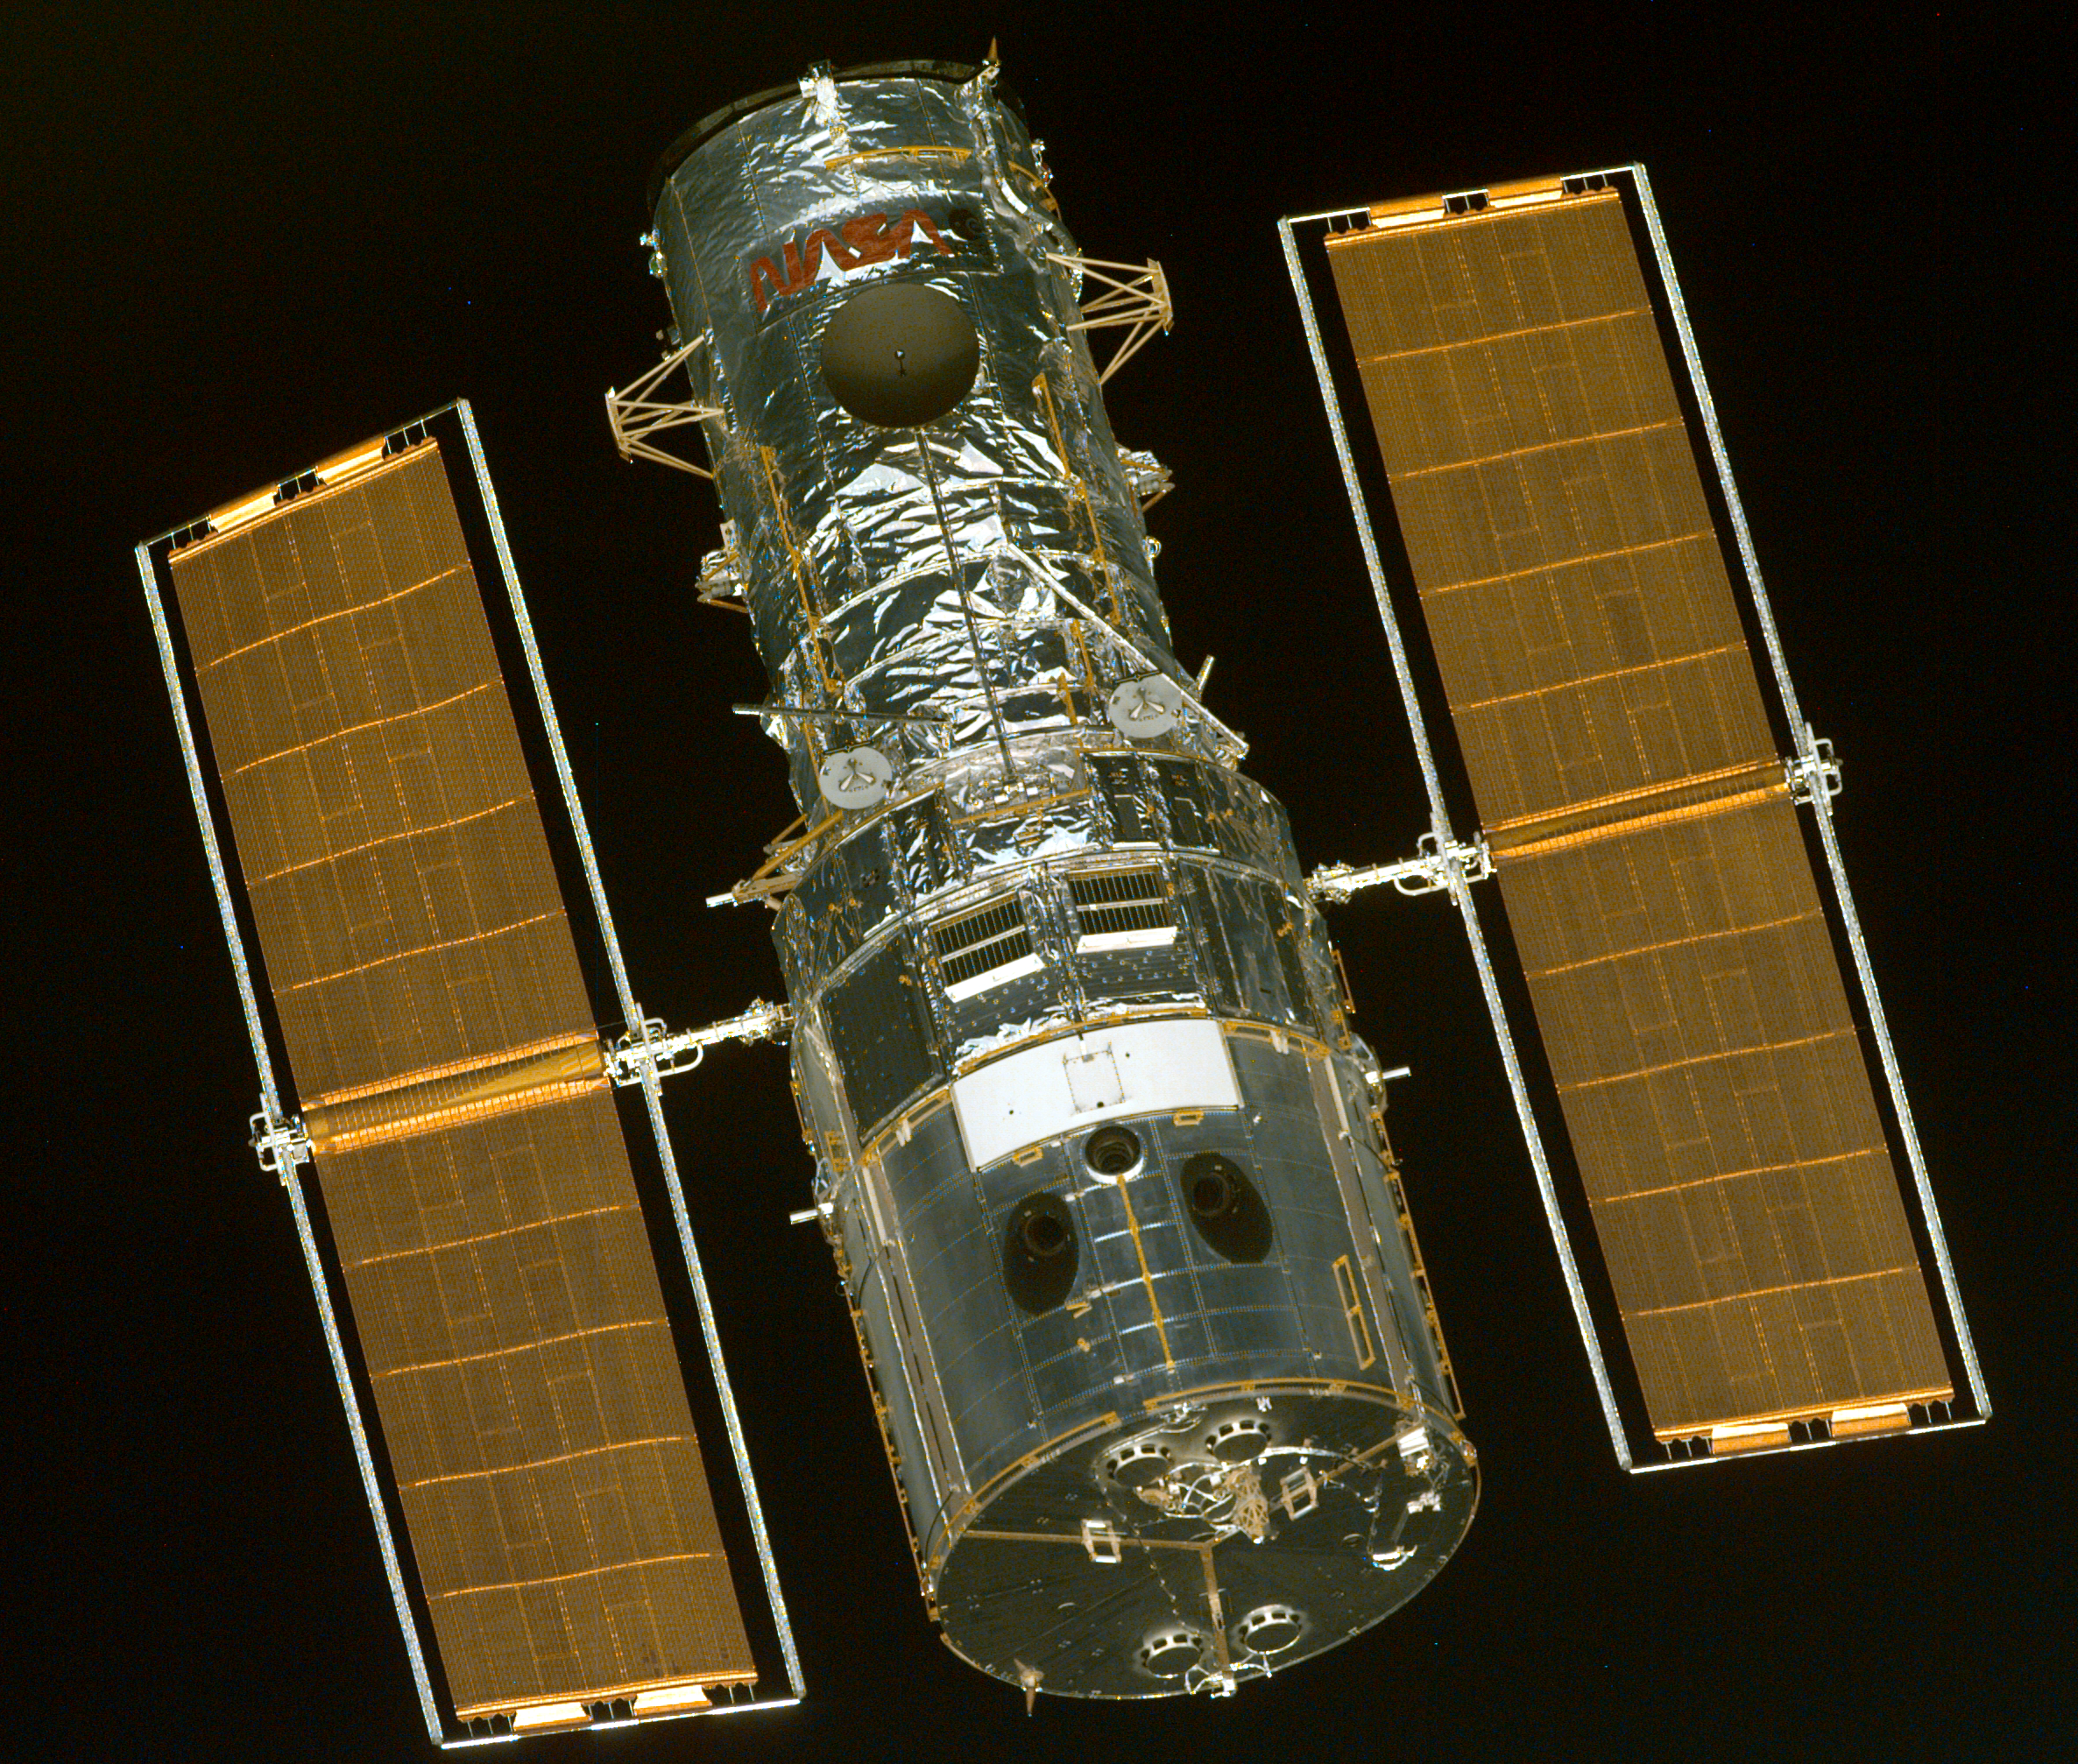

SM3A: Hubble Close-Up

The first of a series of four images recorded from close range as the astronauts aboard the Space Shuttle Discovery prepared to grab the Hubble Space Telescope (HST) with the remote manipulator system (RMS) arm.

Credit: NASA/ESA